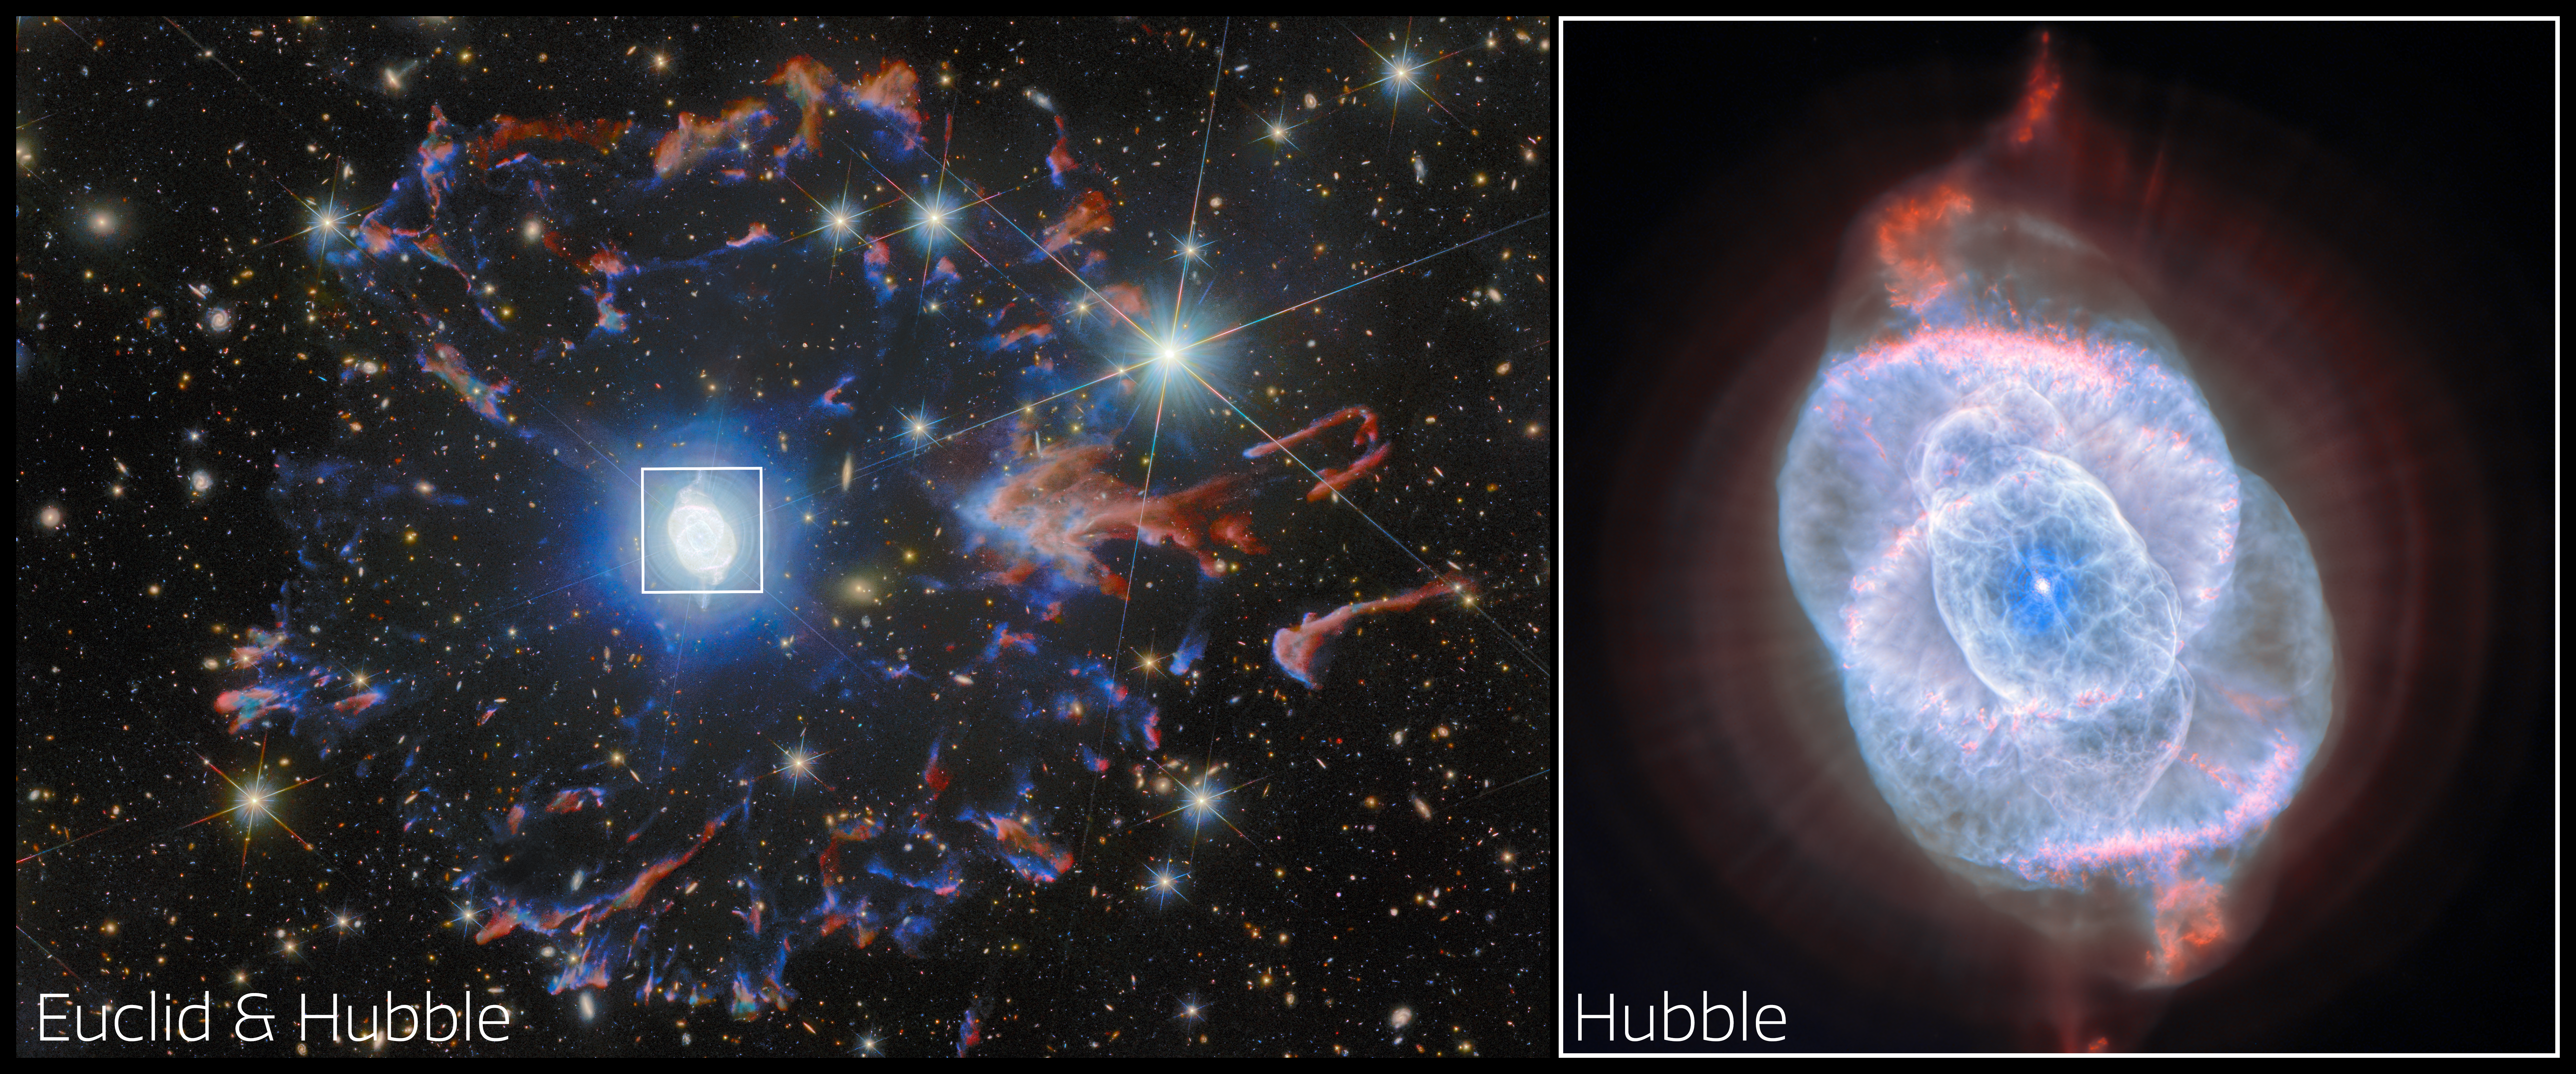

Two observatories, one cosmic eye

For this month’s ESA/Hubble Picture of the Month, we turn our gaze to one of the most visually intricate remnants of a dying star: the Cat’s Eye Nebula, also known as NGC 6543. This extraordinary planetary nebula lies in the constellation Draco and has captivated astronomers for decades with its elaborate and multilayered structure. Observations with ESA’s Gaia mission place the nebula at a distance of 4 400 light years away.

Planetary nebulae, so-called because of their round shape when viewed through early telescopes, are in fact expanding gas thrown off by stars in their final stages of evolution. It was the Cat’s Eye Nebula itself where this fact was first discovered in 1864 — examining the spectrum of its light reveals the emission from individual molecules that’s characteristic of a gas, distinguishing planetary nebulae from stars and galaxies.

The NASA/ESA Hubble Space Telescope also revolutionised our understanding of planetary nebulae; its detailed images showed that the simple, circular appearance of a planetary nebula seen from the ground belies a very complex morphology. This was particularly true of the Cat’s Eye Nebula, where Hubble’s images in 1995 revealed never-before-seen structures that broadened our understanding of how planetary nebulae come to be.

This time, Hubble is joined by ESA’s Euclid space telescope to create a new image of NGC 6543. The nebula is showcased through the combined eyes of Hubble and Euclid, revealing the remarkable complexity of stellar death in this object. Though primarily designed to map the distant Universe, Euclid captures the Cat’s Eye Nebula as part of its deep imaging surveys. In Euclid’s wide, near-infrared and visible light view, the arcs and filaments of the nebula’s bright central region are situated within a halo of colourful fragments of gas zooming away from the star. This ring was ejected from the star at an earlier stage, before the main nebula at the centre formed. The whole nebula stands out against a backdrop teeming with distant galaxies, demonstrating how local astrophysical beauty and the farthest reaches of the cosmos can be seen together with Euclid.

Within this broad view of the nebula and its surroundings, Hubble captures the very core of the billowing gas with high-resolution visible-light images, adding extra detail in the centre of this image. The data reveal a tapestry of concentric shells, jets of high-speed gas and dense knots sculpted by shock interactions, features that appear almost surreal in their intricacy. These structures are believed to record episodic mass loss from the dying star at the nebula’s centre, creating a kind of cosmic “fossil record” of its final evolutionary stages.

Combining the focused view of Hubble with Euclid’s deep field observations not only highlights the nebula’s exquisite structure, but also places it within the broader context of the Universe that both space telescopes explore. Together, these missions provide a rich and complementary view of NGC 6543 — revealing the delicate interplay between stellar end-of-life processes and the vast cosmic tapestry beyond.

Credit: ESA/Hubble & NASA, ESA Euclid/Euclid Consortium/NASA/Q1-2025, J.-C. Cuillandre & E. Bertin (CEA Paris-Saclay), Z. Tsvetanov